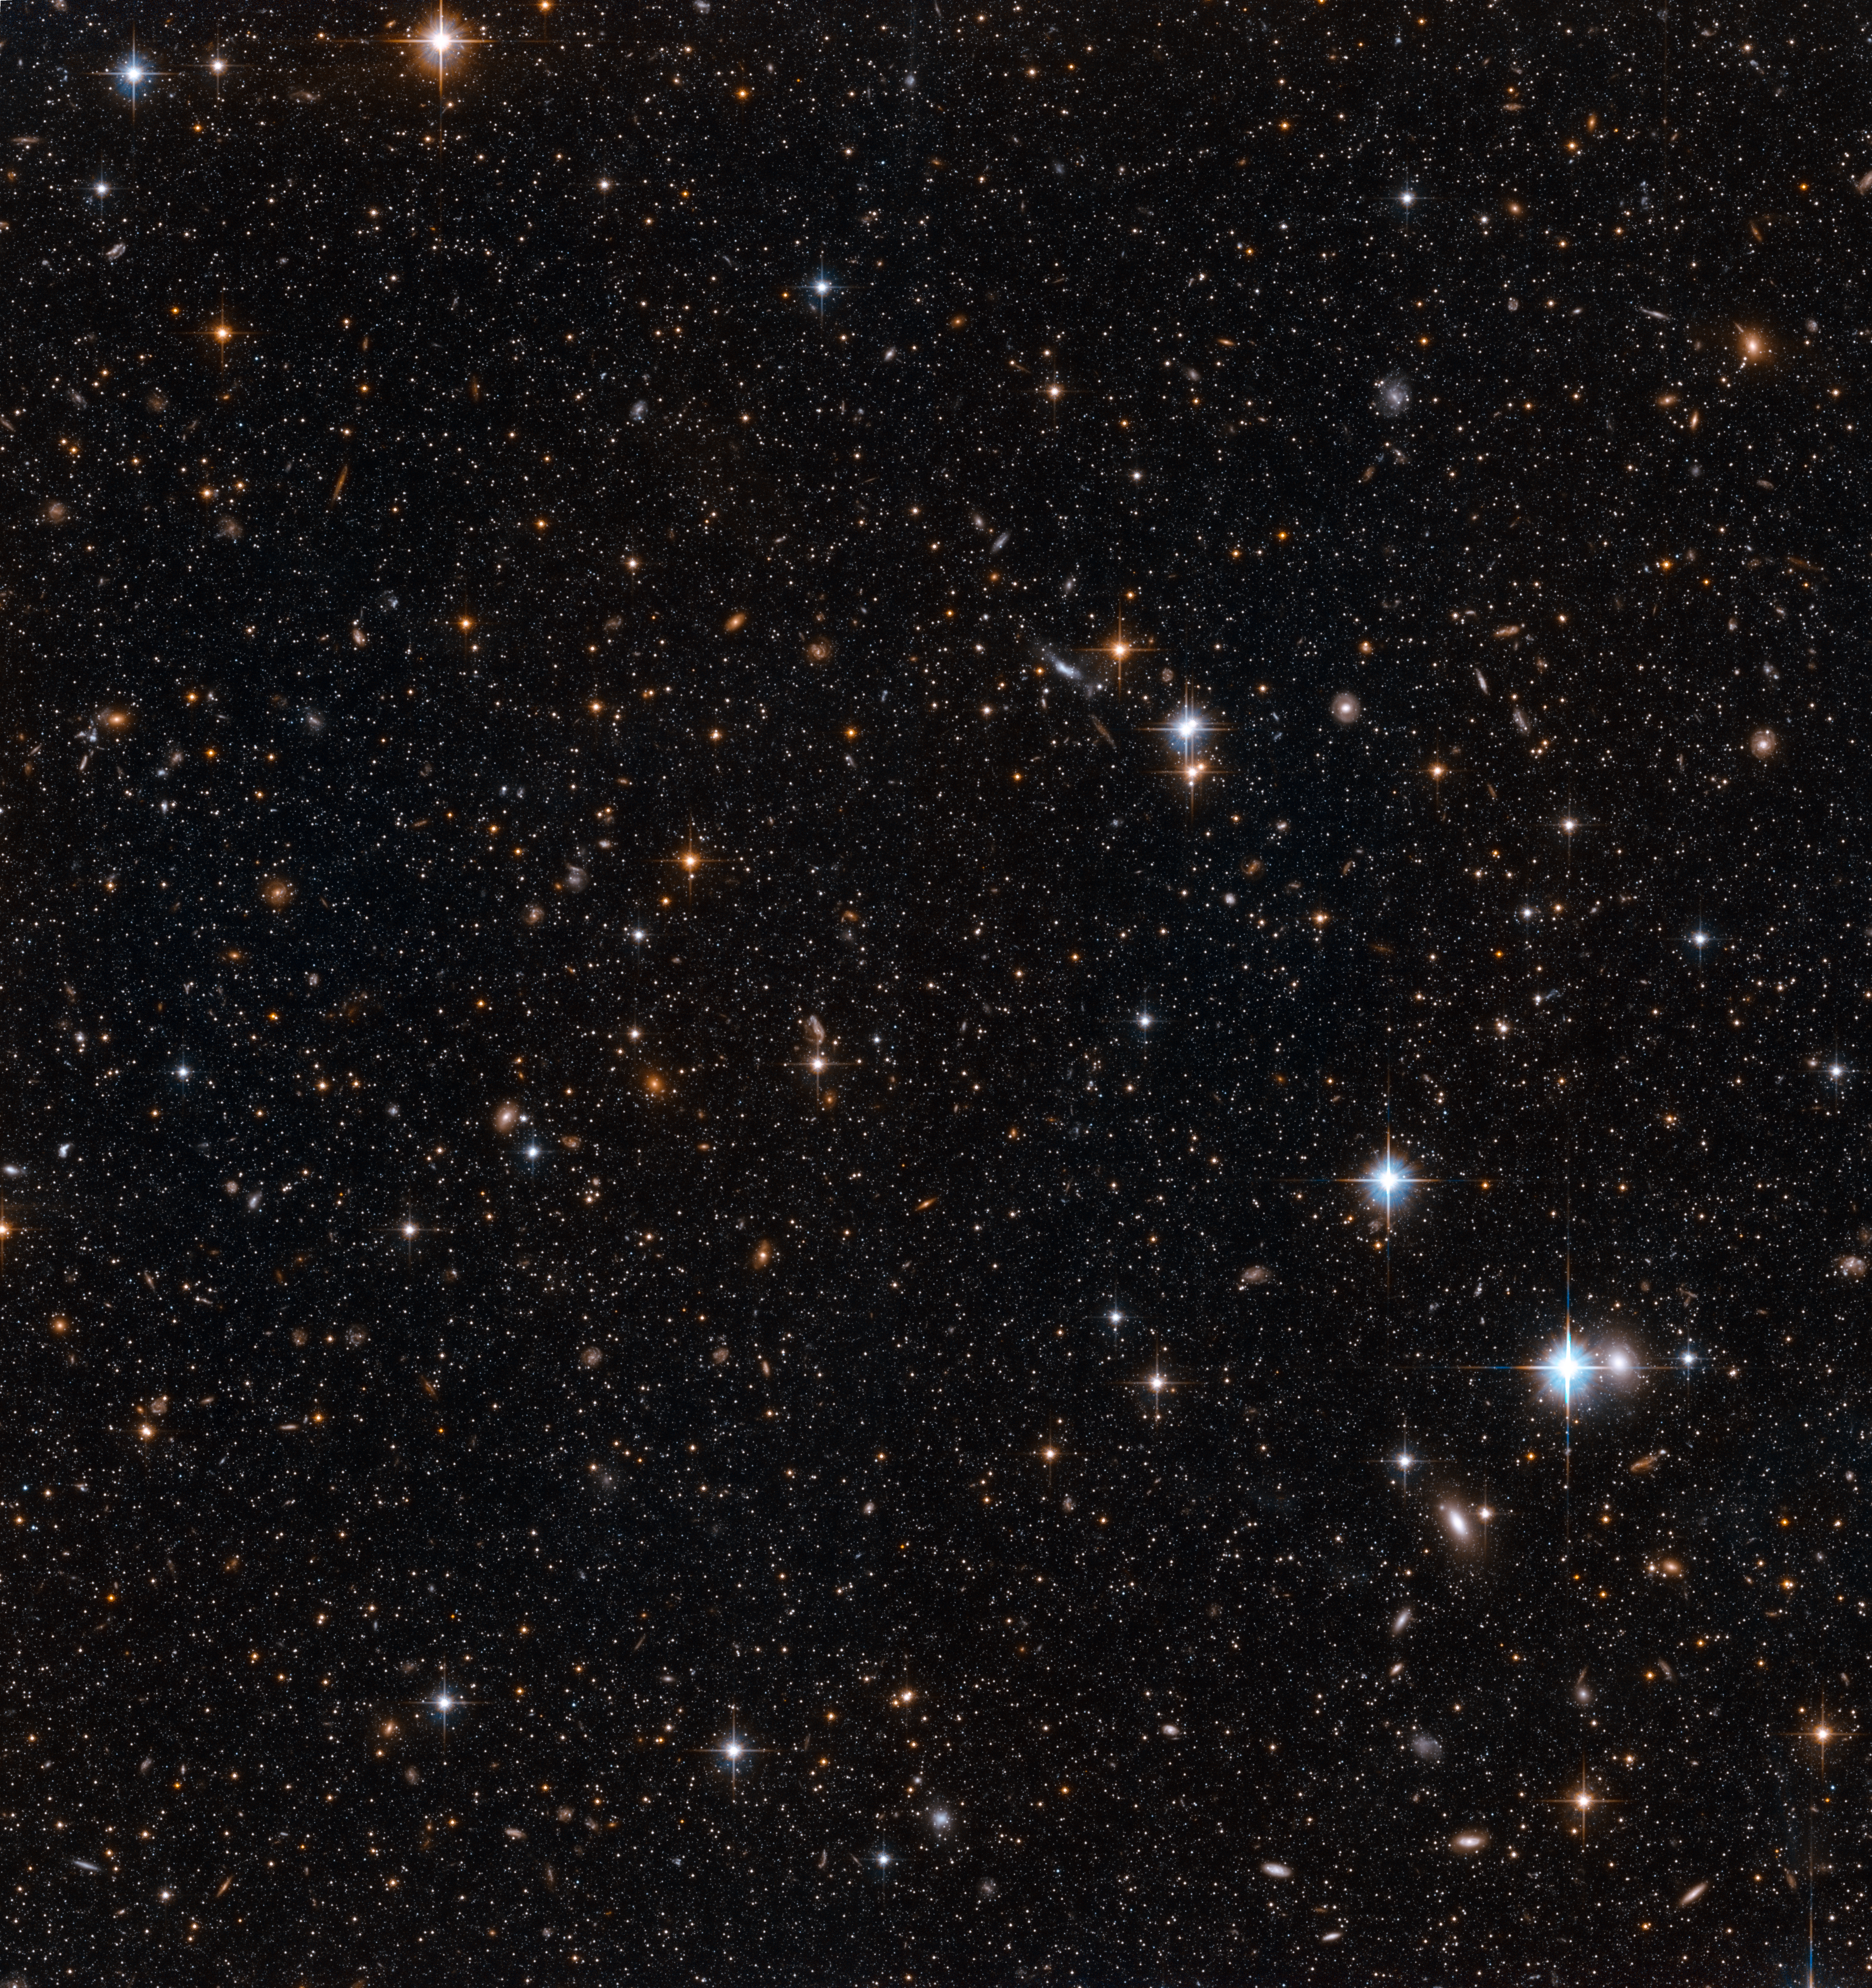

Stars in the Andromeda Galaxy’s disc

This image shows NASA/ESA Hubble Space Telescope images of a small part of the disc of the Andromeda Galaxy, the closest spiral galaxy to the Milky Way. Hubble’s position above the distorting effect of the atmosphere, combined with the galaxy’s relative proximity, means that the galaxy can be resolved into individual stars, rather than the cloudy white wisps usually seen in observations of galaxies.

A galaxy’s disc is the area made up of its spiral arms, and the darker areas between them. After the galaxy’s central bulge, this is the densest part of a galaxy. However, these observations are made near the edge, where the star fields are noticeably less crowded. This lets us see glimpses through the galaxy into the distant background, where the more diffuse blobs of light are actually faraway galaxies.

These observations were made in order to observe a wide variety of stars in Andromeda, ranging from faint main sequence stars like our own Sun, to the much brighter RR Lyrae stars, which are a type of variable star. With these measurements, astronomers can determine the chemistry and ages of the stars in each part of the Andromeda Galaxy.

Credit: NASA, ESA and T.M. Brown (STScI)